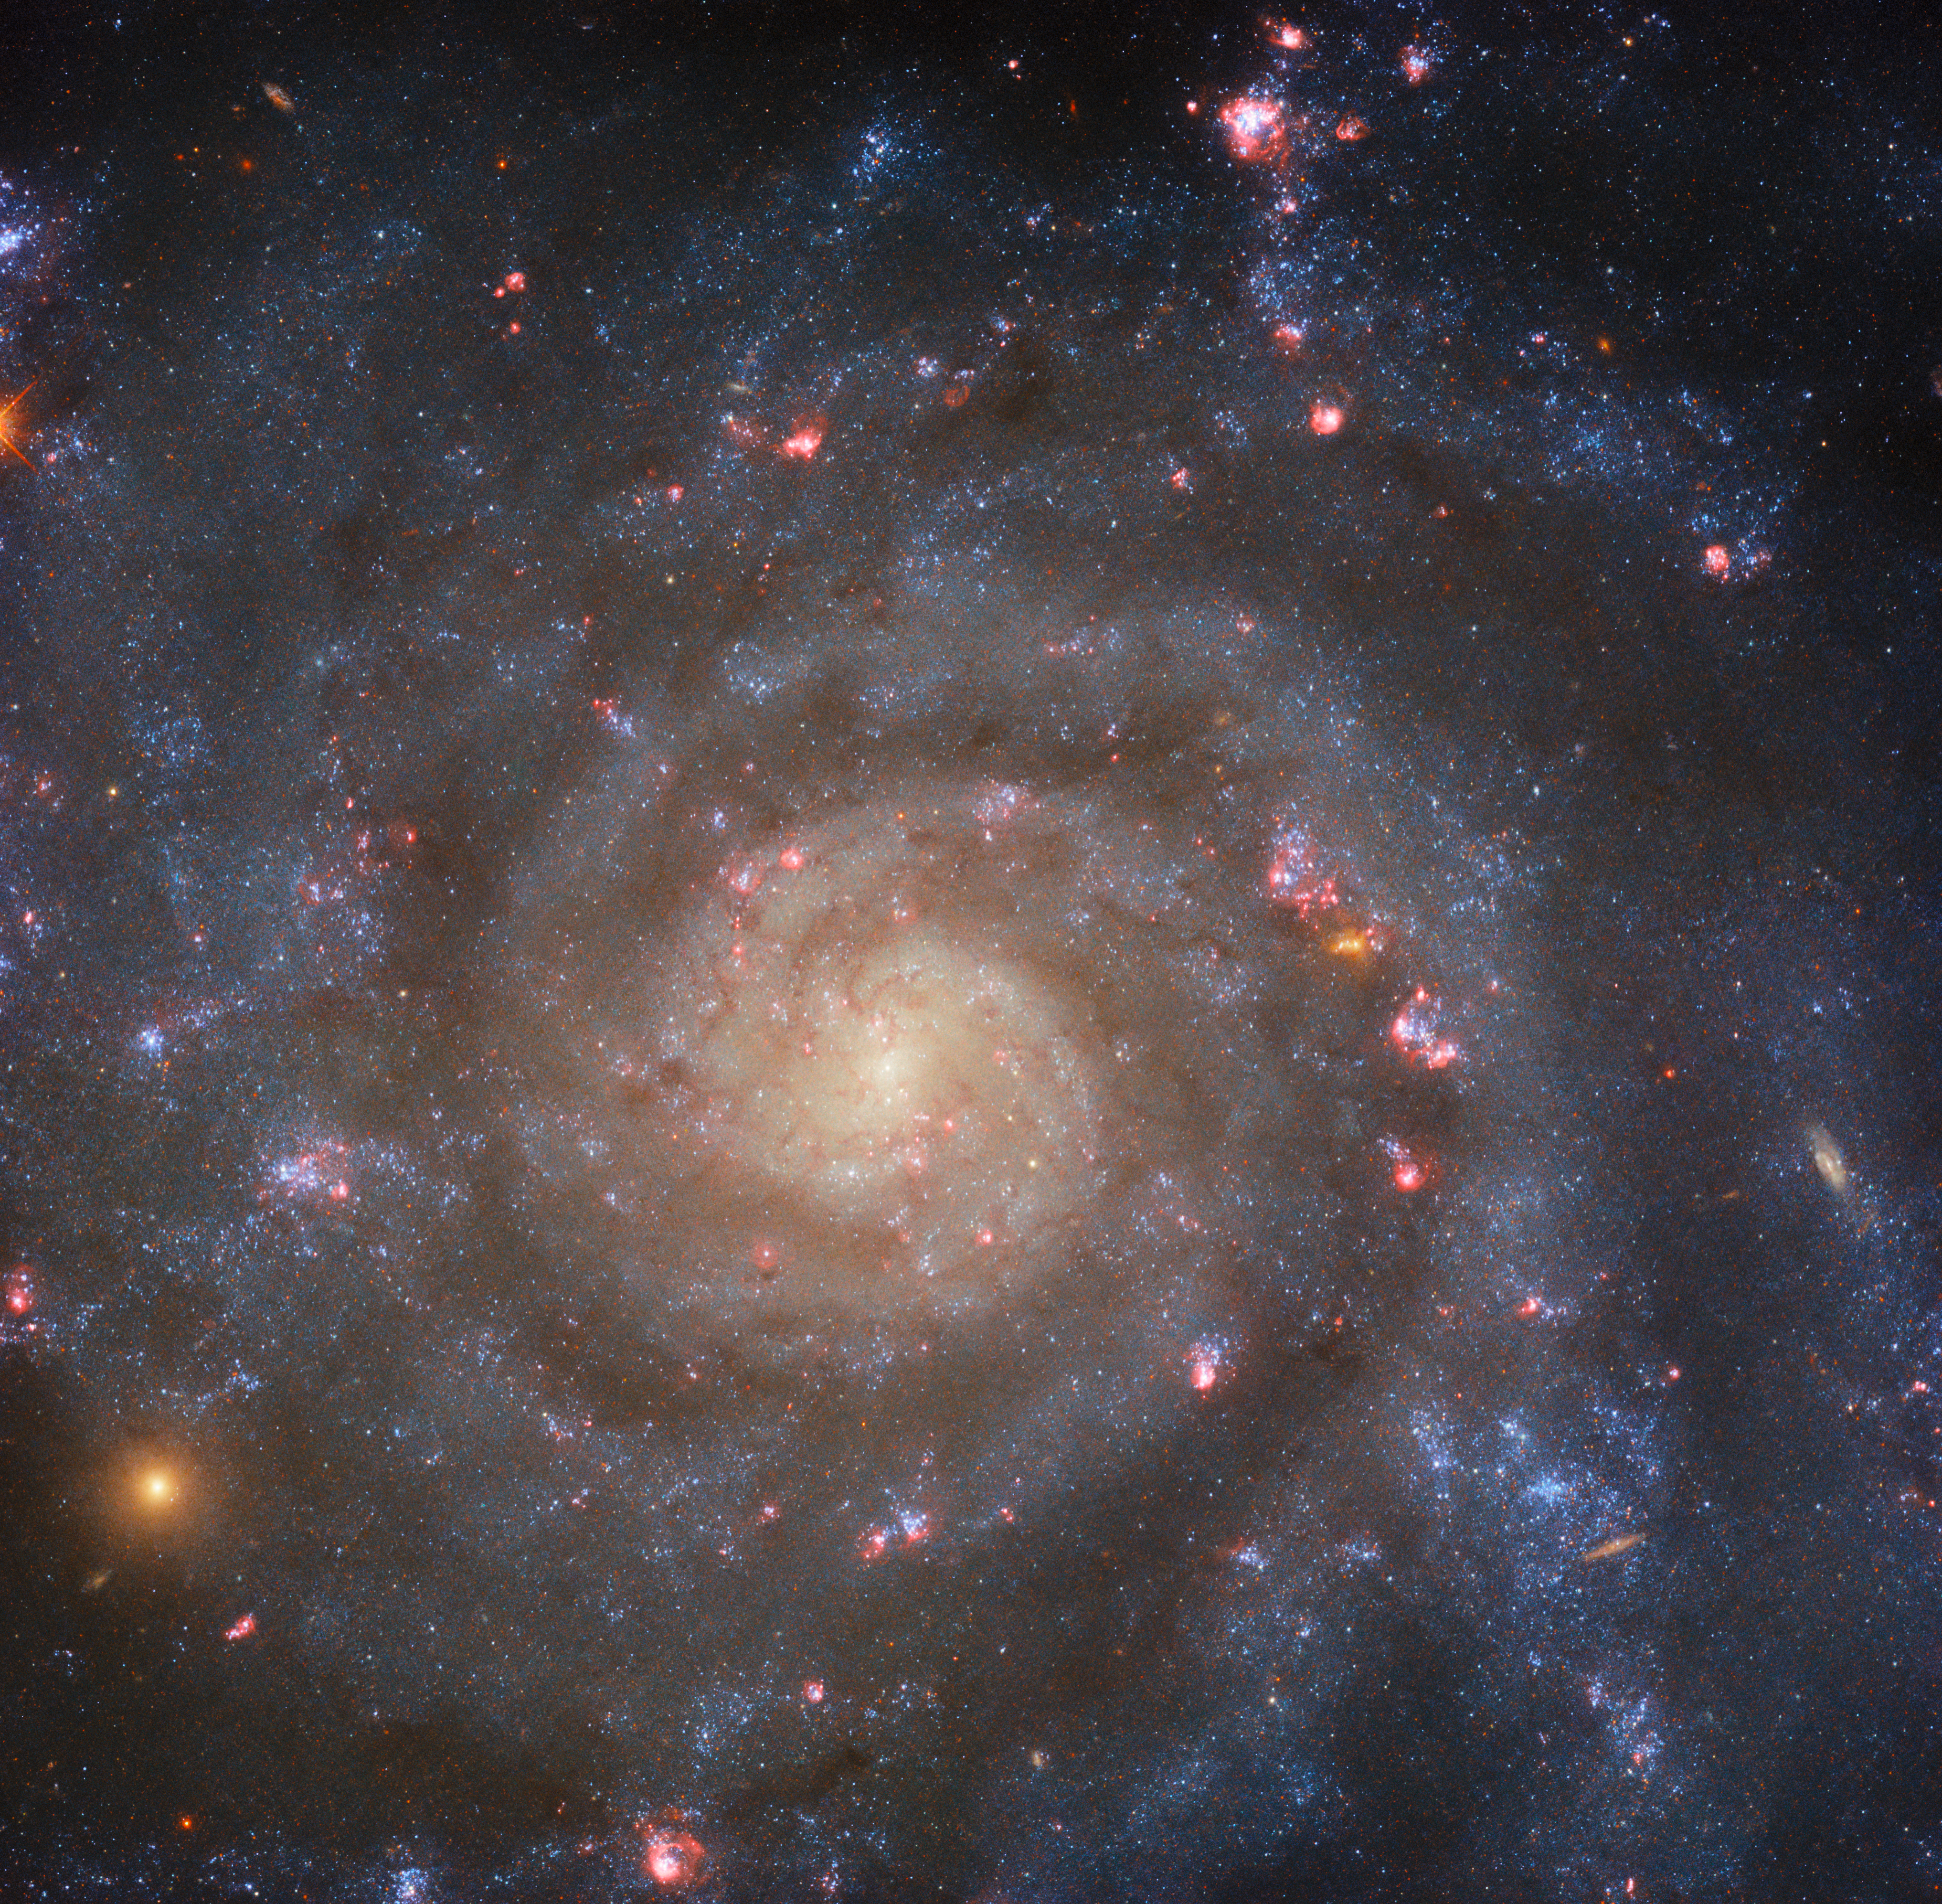

‘S’ is for ‘Spiral’, ‘AB’ is for … ‘Weakly Barred’

This glittering image shows the spiral galaxy IC 5332, which lies about 30 million light-years away in the constellation Sculptor, and has an almost face-on orientation to Earth. To explain what is meant by ‘face-on’, it is helpful to visualise a spiral galaxy as an (extremely) large disc. If the galaxy is oriented so that it appears circular and disc-shaped from our perspective here on Earth, then we can say that it is ‘face-on’. In contrast, if it is oriented so that it appears squashed and oval-shaped, then we would say that it is ‘edge-on’. The key thing is that the same galaxy would look extremely different from our perspective depending on whether it was face-on or edge-on as seen from Earth. Check out these previous Hubble Pictures of the Week for examples of another face-on spiral galaxy and an almost edge-on spiral galaxy.

IC 5332 is designated as an SABc-type galaxy in the De Vaucouleurs system of galaxy classification. The ‘S’ is straightforward, identifying it as a spiral galaxy, which it clearly is, given the well-defined arms of bright stars and darker dust that curl outwards from the galaxy’s dense and bright core. The ‘AB’ is a little more complex. It means that the galaxy is weakly barred, which refers to the shape of the galaxy’s centre. The majority of spiral galaxies do not spiral out from a single point, but rather from an elongated bar-type structure. SAB galaxies — which are also known as intermediate spiral galaxies — do not have a clear bar-shape at their core, but also do not spiral out from a single point, instead falling somewhere in between. The lowercase ‘c’ describes how tightly wound the spiral arms are: ‘a’ would indicate very tightly wound, and ‘d’ very loosely wound. Thus, IC 5332 is quite an intermediate spiral galaxy on many fronts: weakly barred, with quite loosely wound arms, and almost completely face-on!

Credit: ESA/Hubble & NASA, R. Chandar, J. Lee and the PHANGS-HST team